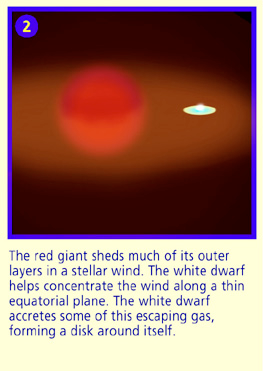

Panel 2

The red giant sheds much of its outer layers in a stellar wind. The white dwarf helps concentrate the wind along a thin equatorial plane. The white dwarf accretes some of this escaping gas forming a disk around the itself.

Credit: NASA & ESA